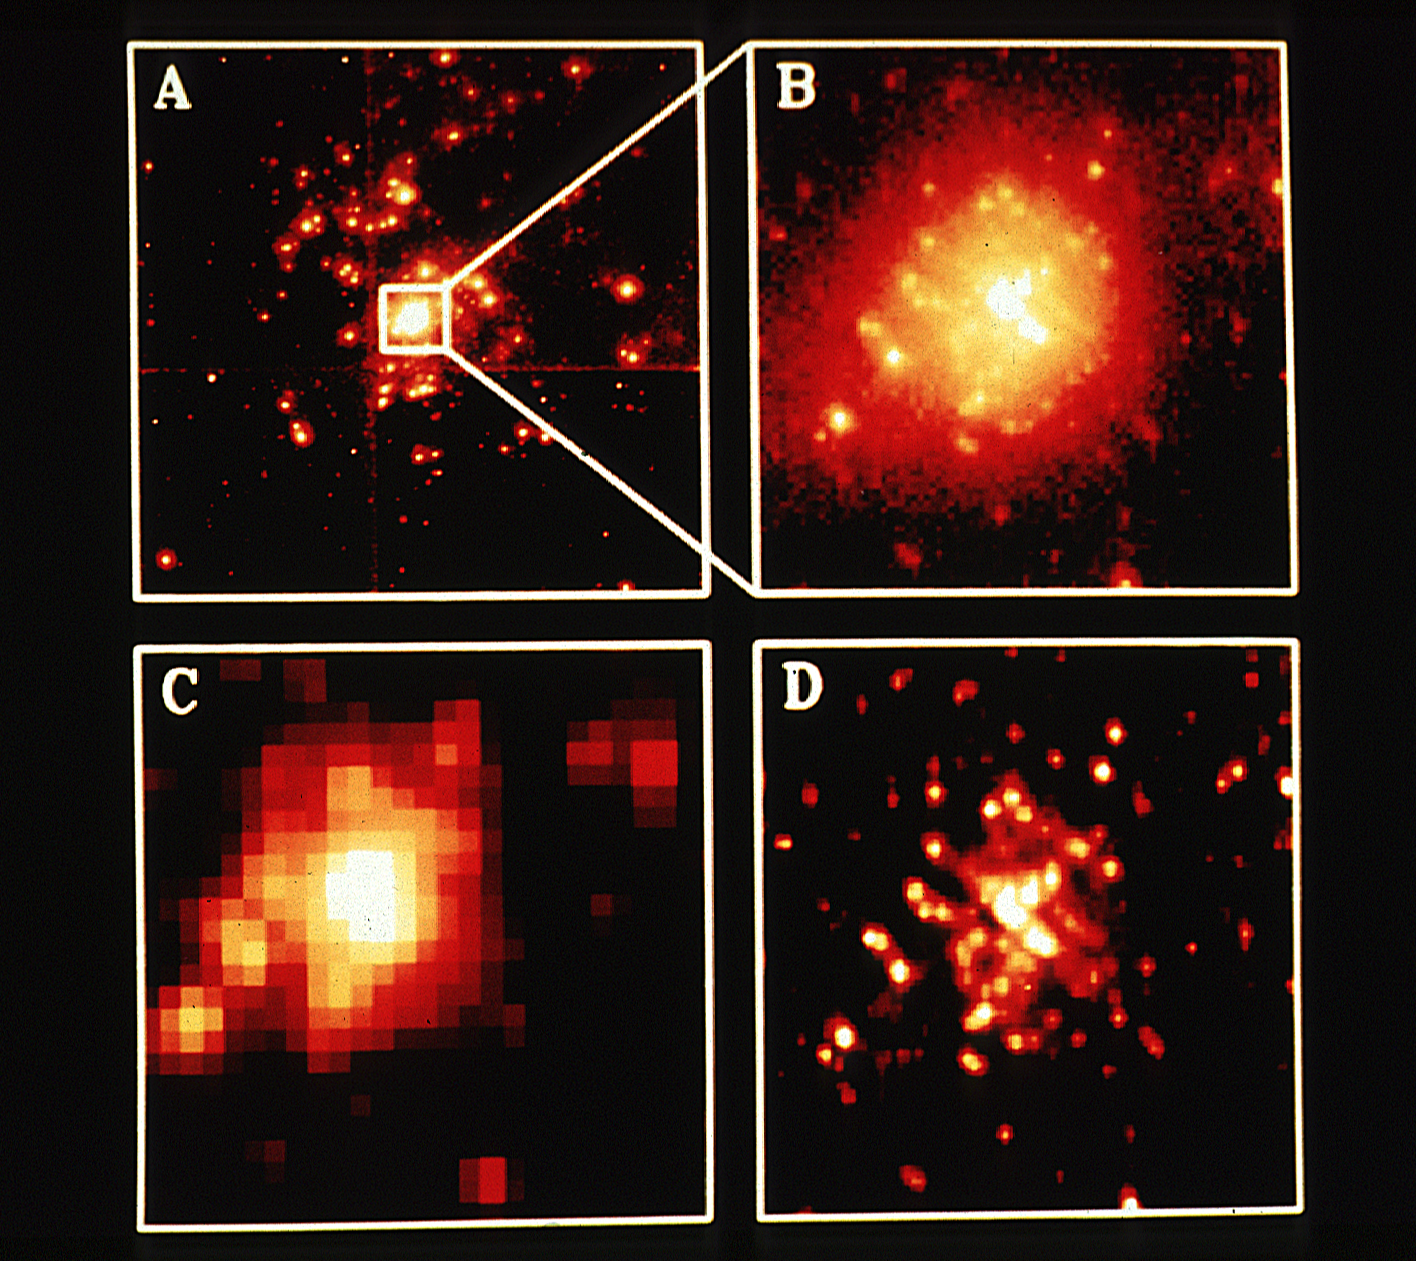

HST and ground based telescope photo

The accompanying illustration consists of four images of the remarkable cluster of tightly-packed young stars in the 30 Doradus Nebula, 160,000 light years from Earth in the Large Magellanic Cloud Galaxy.

Panel A (upper left) is a portion of a photograph made with the Wide Field/Planetary Camera on HST on August 3, 1990. The camera photographed four adjoining sky regions simultaneously, which are here assembled in a mosaic.

Credit: NASA/ESA